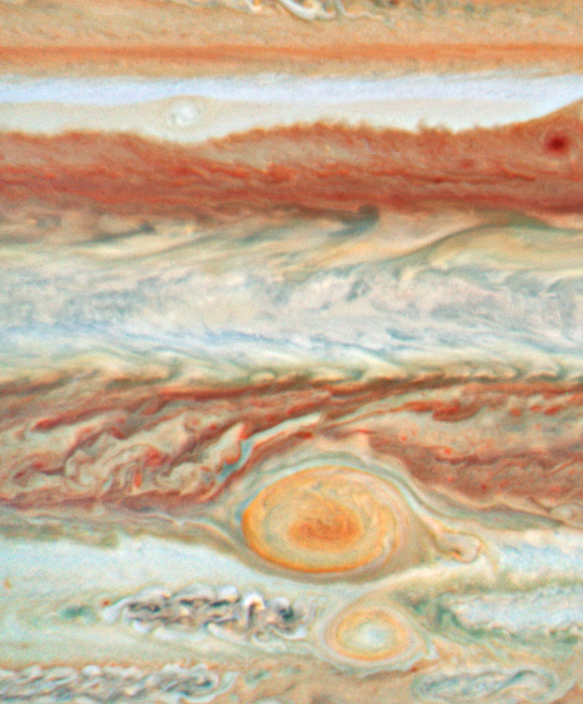

Jupiter - 8 July 2008

Jupiter - 8 July 2008

Credit: NASA, ESA and A. Simon-Miller (NASA Goddard Space Flight Center)